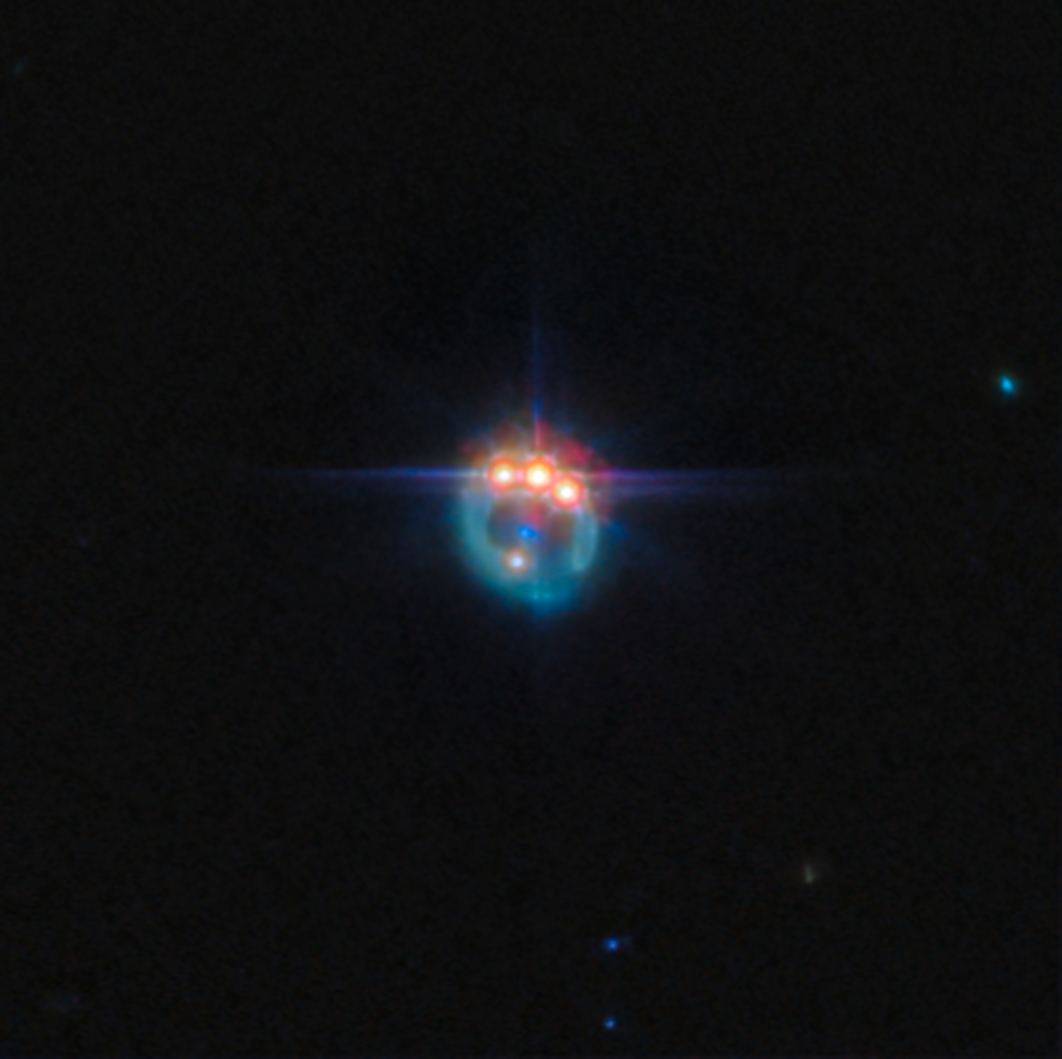

Jewelled ring

This new ESA/Webb Picture of the Month features the gravitational lensing of the quasar known as RX J1131-1231, located roughly 6 billion light-years from Earth in the constellation Crater. It is considered one of the best lensed quasars discovered to date, as the foreground galaxy smears the image of the background quasar into a bright arc and creates four images of the object.

Gravitational lensing, first predicted by Einstein, offers a rare opportunity to study regions close to the black hole in distant quasars, by acting as a natural telescope and magnifying the light from these sources. All matter in the Universe warps the space around itself, with larger masses producing a more pronounced effect. Around very massive objects, such as galaxies, light that passes close by follows this warped space, appearing to bend away from its original path by a clearly visible amount. One of the consequential effects of gravitational lensing is that it can magnify distant astronomical objects, letting astronomers study objects that would otherwise be too faint or far away.

Measurements of the X-ray emission from quasars can provide an indication of how fast the central black hole is spinning, which can provide researchers important clues about how black holes grow over time. For example, if a black hole grows primarily from collisions and mergers between galaxies, it should accumulate material in a stable disc, and the steady supply of new material from the disc should lead to a rapidly spinning black hole. On the other hand, if the black hole grew through many small accretion episodes, it would accumulate material from random directions. Observations have indicated that the black hole in this particular quasar is spinning at over half the speed of light, which suggests that this black hole has grown via mergers, rather than pulling material in from different directions.

This image was captured with Webb’s MIRI (Mid-Infrared Instrument) as part of an observation programme to study dark matter. Dark matter is an invisible form of matter that accounts for most of the Universe's mass. Webb’s observations of quasars are allowing astronomers to probe the nature of dark matter at smaller scales than ever before.

Credit: ESA/Webb, NASA & CSA, A. Nierenberg